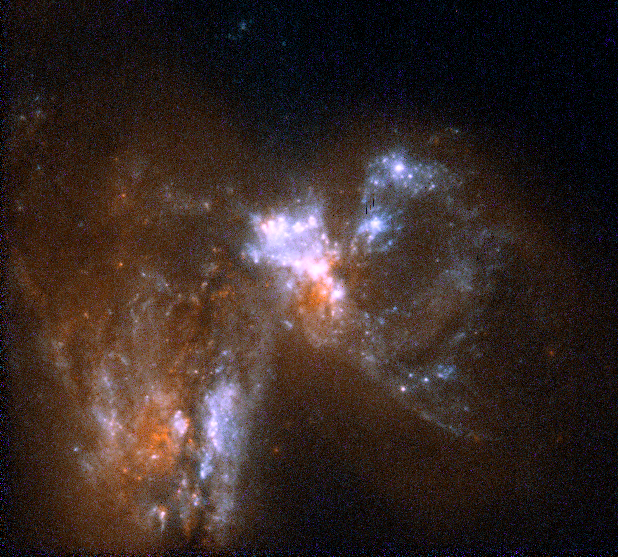

Merging Galaxies UGC06471 and UGC06472

The picture at right shows a cosmic collision between two galaxies, UGC 06471 and UGC 06472. These collisions occurred frequently in the early universe, producing galaxies of unusual shapes. The Hubble telescope has spied many such galaxies in the deep field surveys.

Credit: Rogier Windhorst (Arizona State University, Tempe, AZ), the Hubble mid-UV team and NASA/ESA